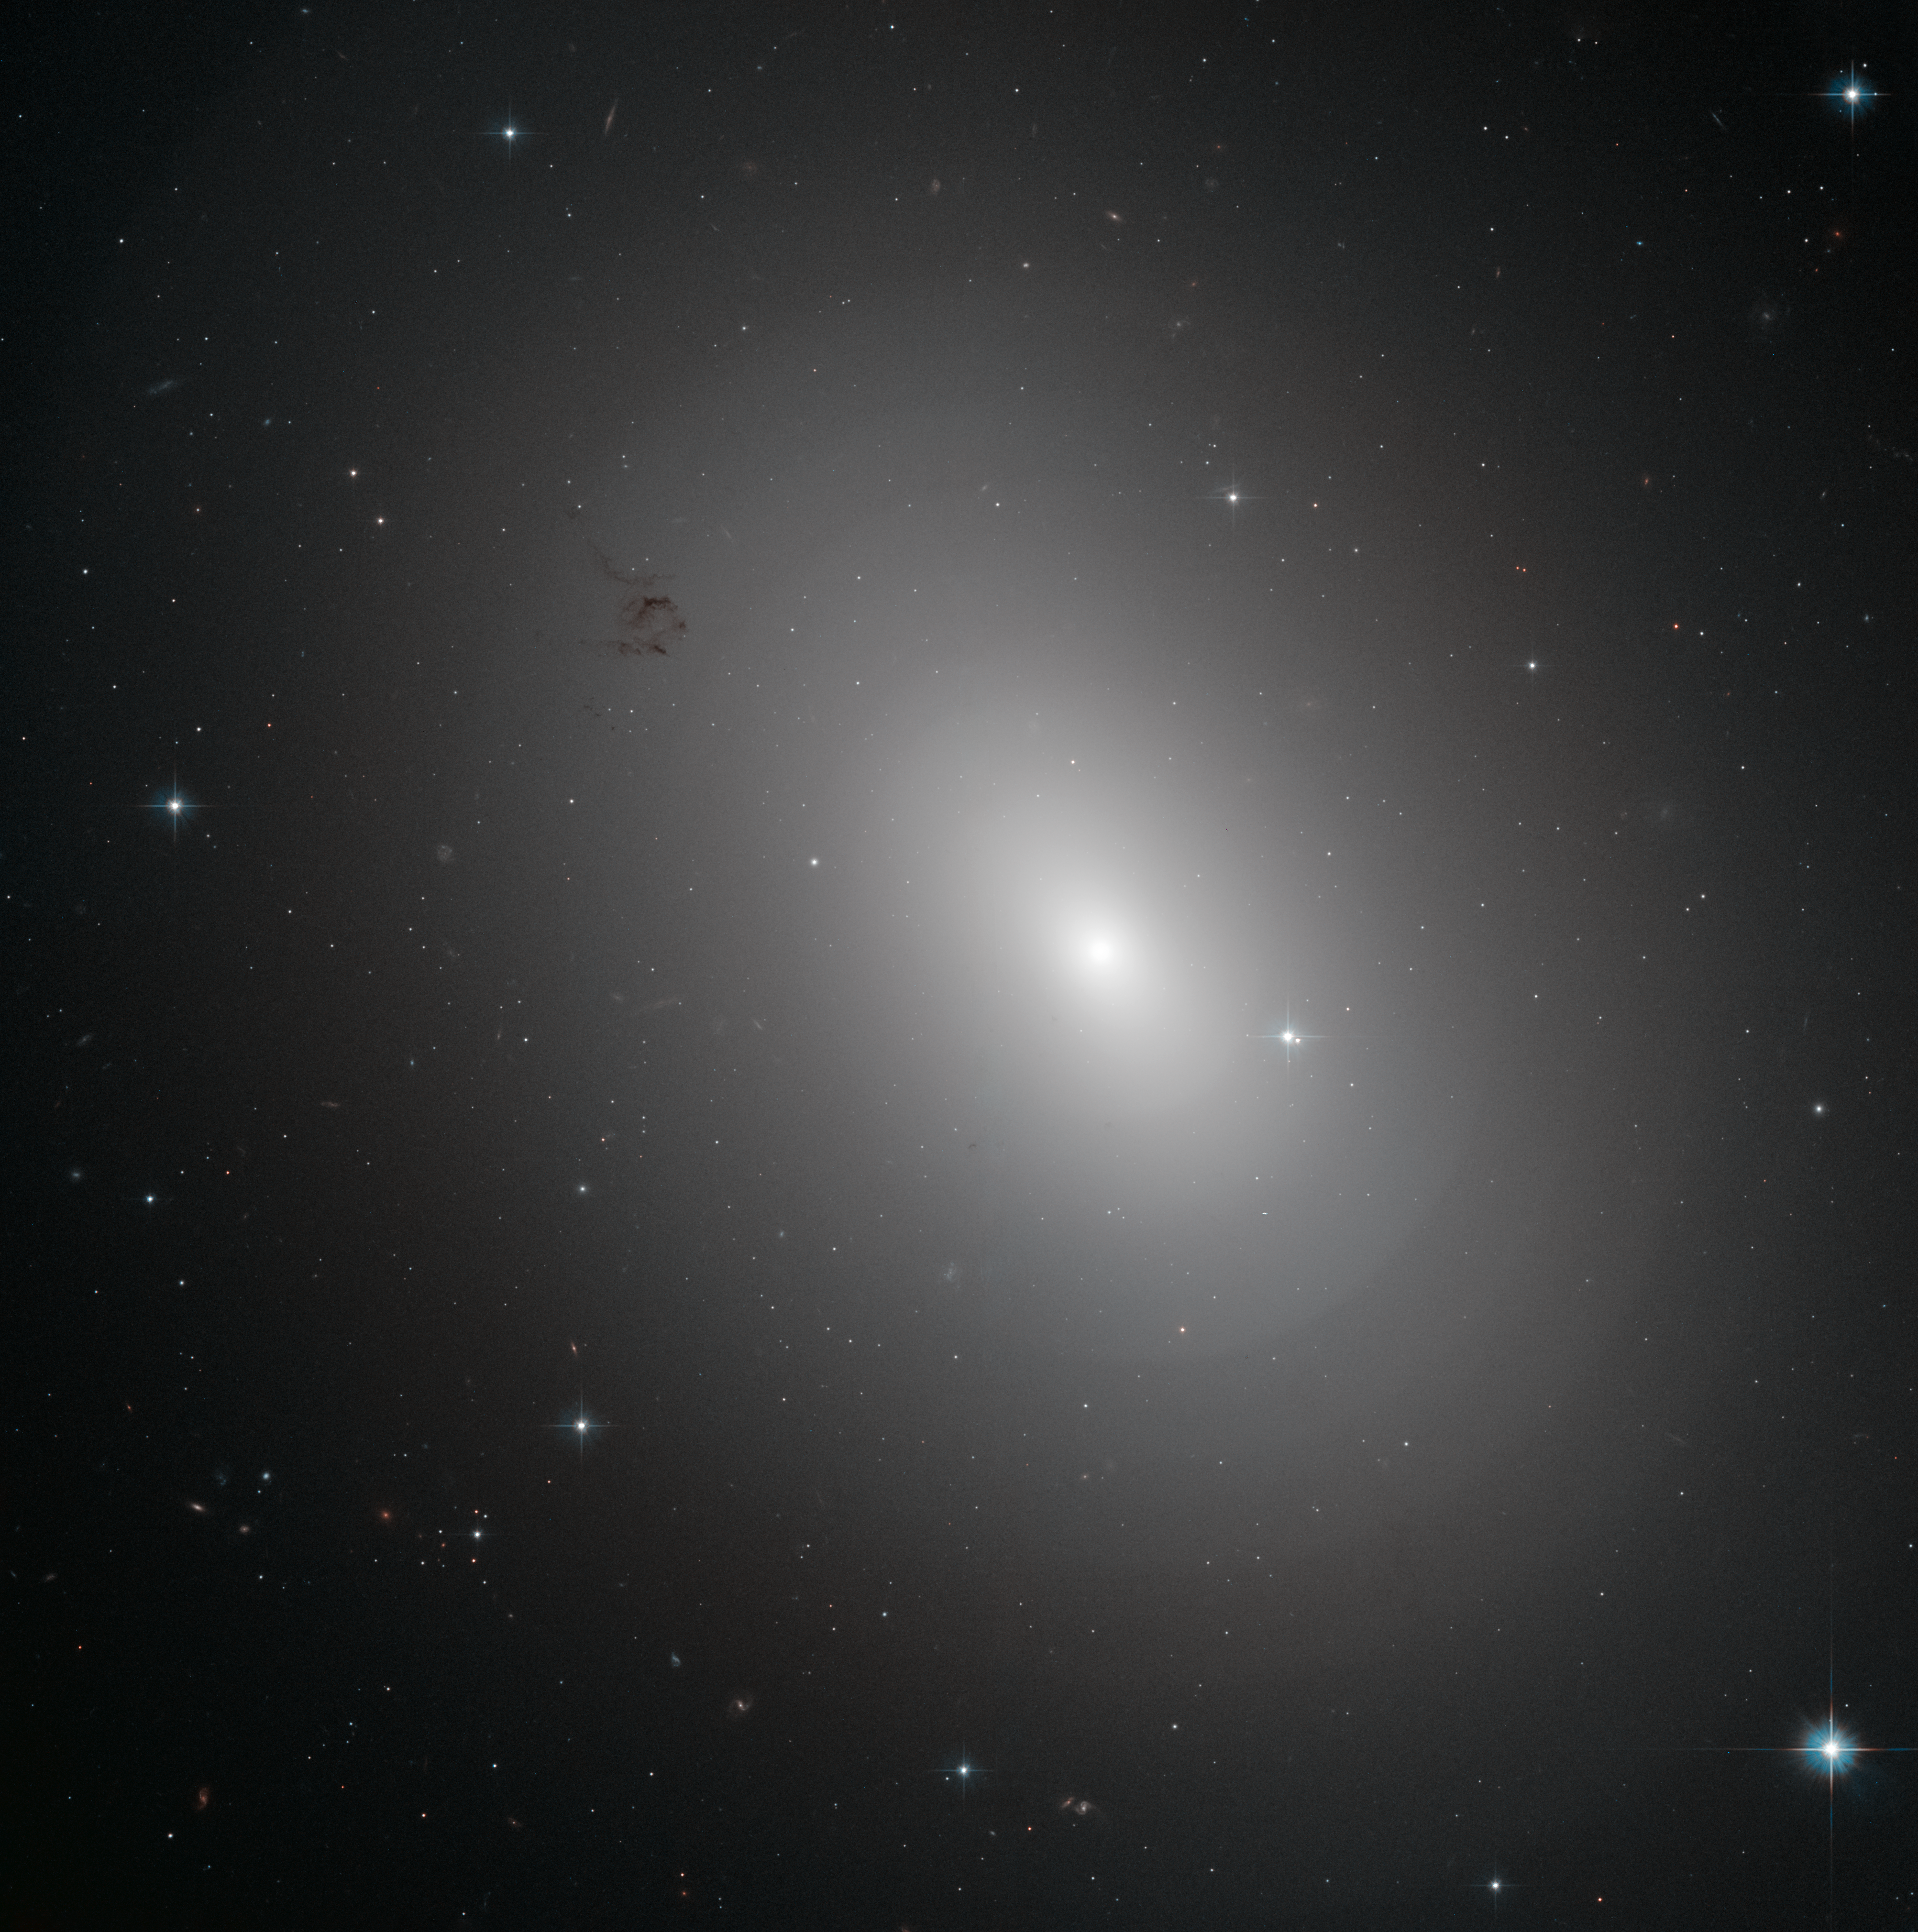

Galactic onion

The glowing object in this image is an elliptical galaxy called NGC 3923. It is located over 90 million light-years away in the constellation of Hydra.

NGC 3923 is an example of a shell galaxy where the stars in its halo are arranged in layers.

Finding concentric shells of stars enclosing a galaxy is quite common and is observed in many elliptical galaxies. In fact, every tenth elliptical galaxy exhibits this onion-like structure, which has never been observed in spiral galaxies. The shell-like structures are thought to develop as a consequence of galactic cannibalism, when a larger galaxy ingests a smaller companion. As the two centres approach, they initially oscillate about a common centre, and this oscillation ripples outwards forming the shells of stars just as ripples on a pond spread when the surface is disturbed.

NGC 3923 has over twenty shells, with only a few of the outer ones visible in this image and its shells are much more subtle than those of other shell galaxies. The shells of this galaxy are also interestingly symmetrical, while other shell galaxies are more skewed.

A version of this image was entered into the Hubble’s Hidden Treasures image processing competition by contestant Judy Schmidt.

Credit: ESA/Hubble & NASA Acknowledgement: Judy Schmidt